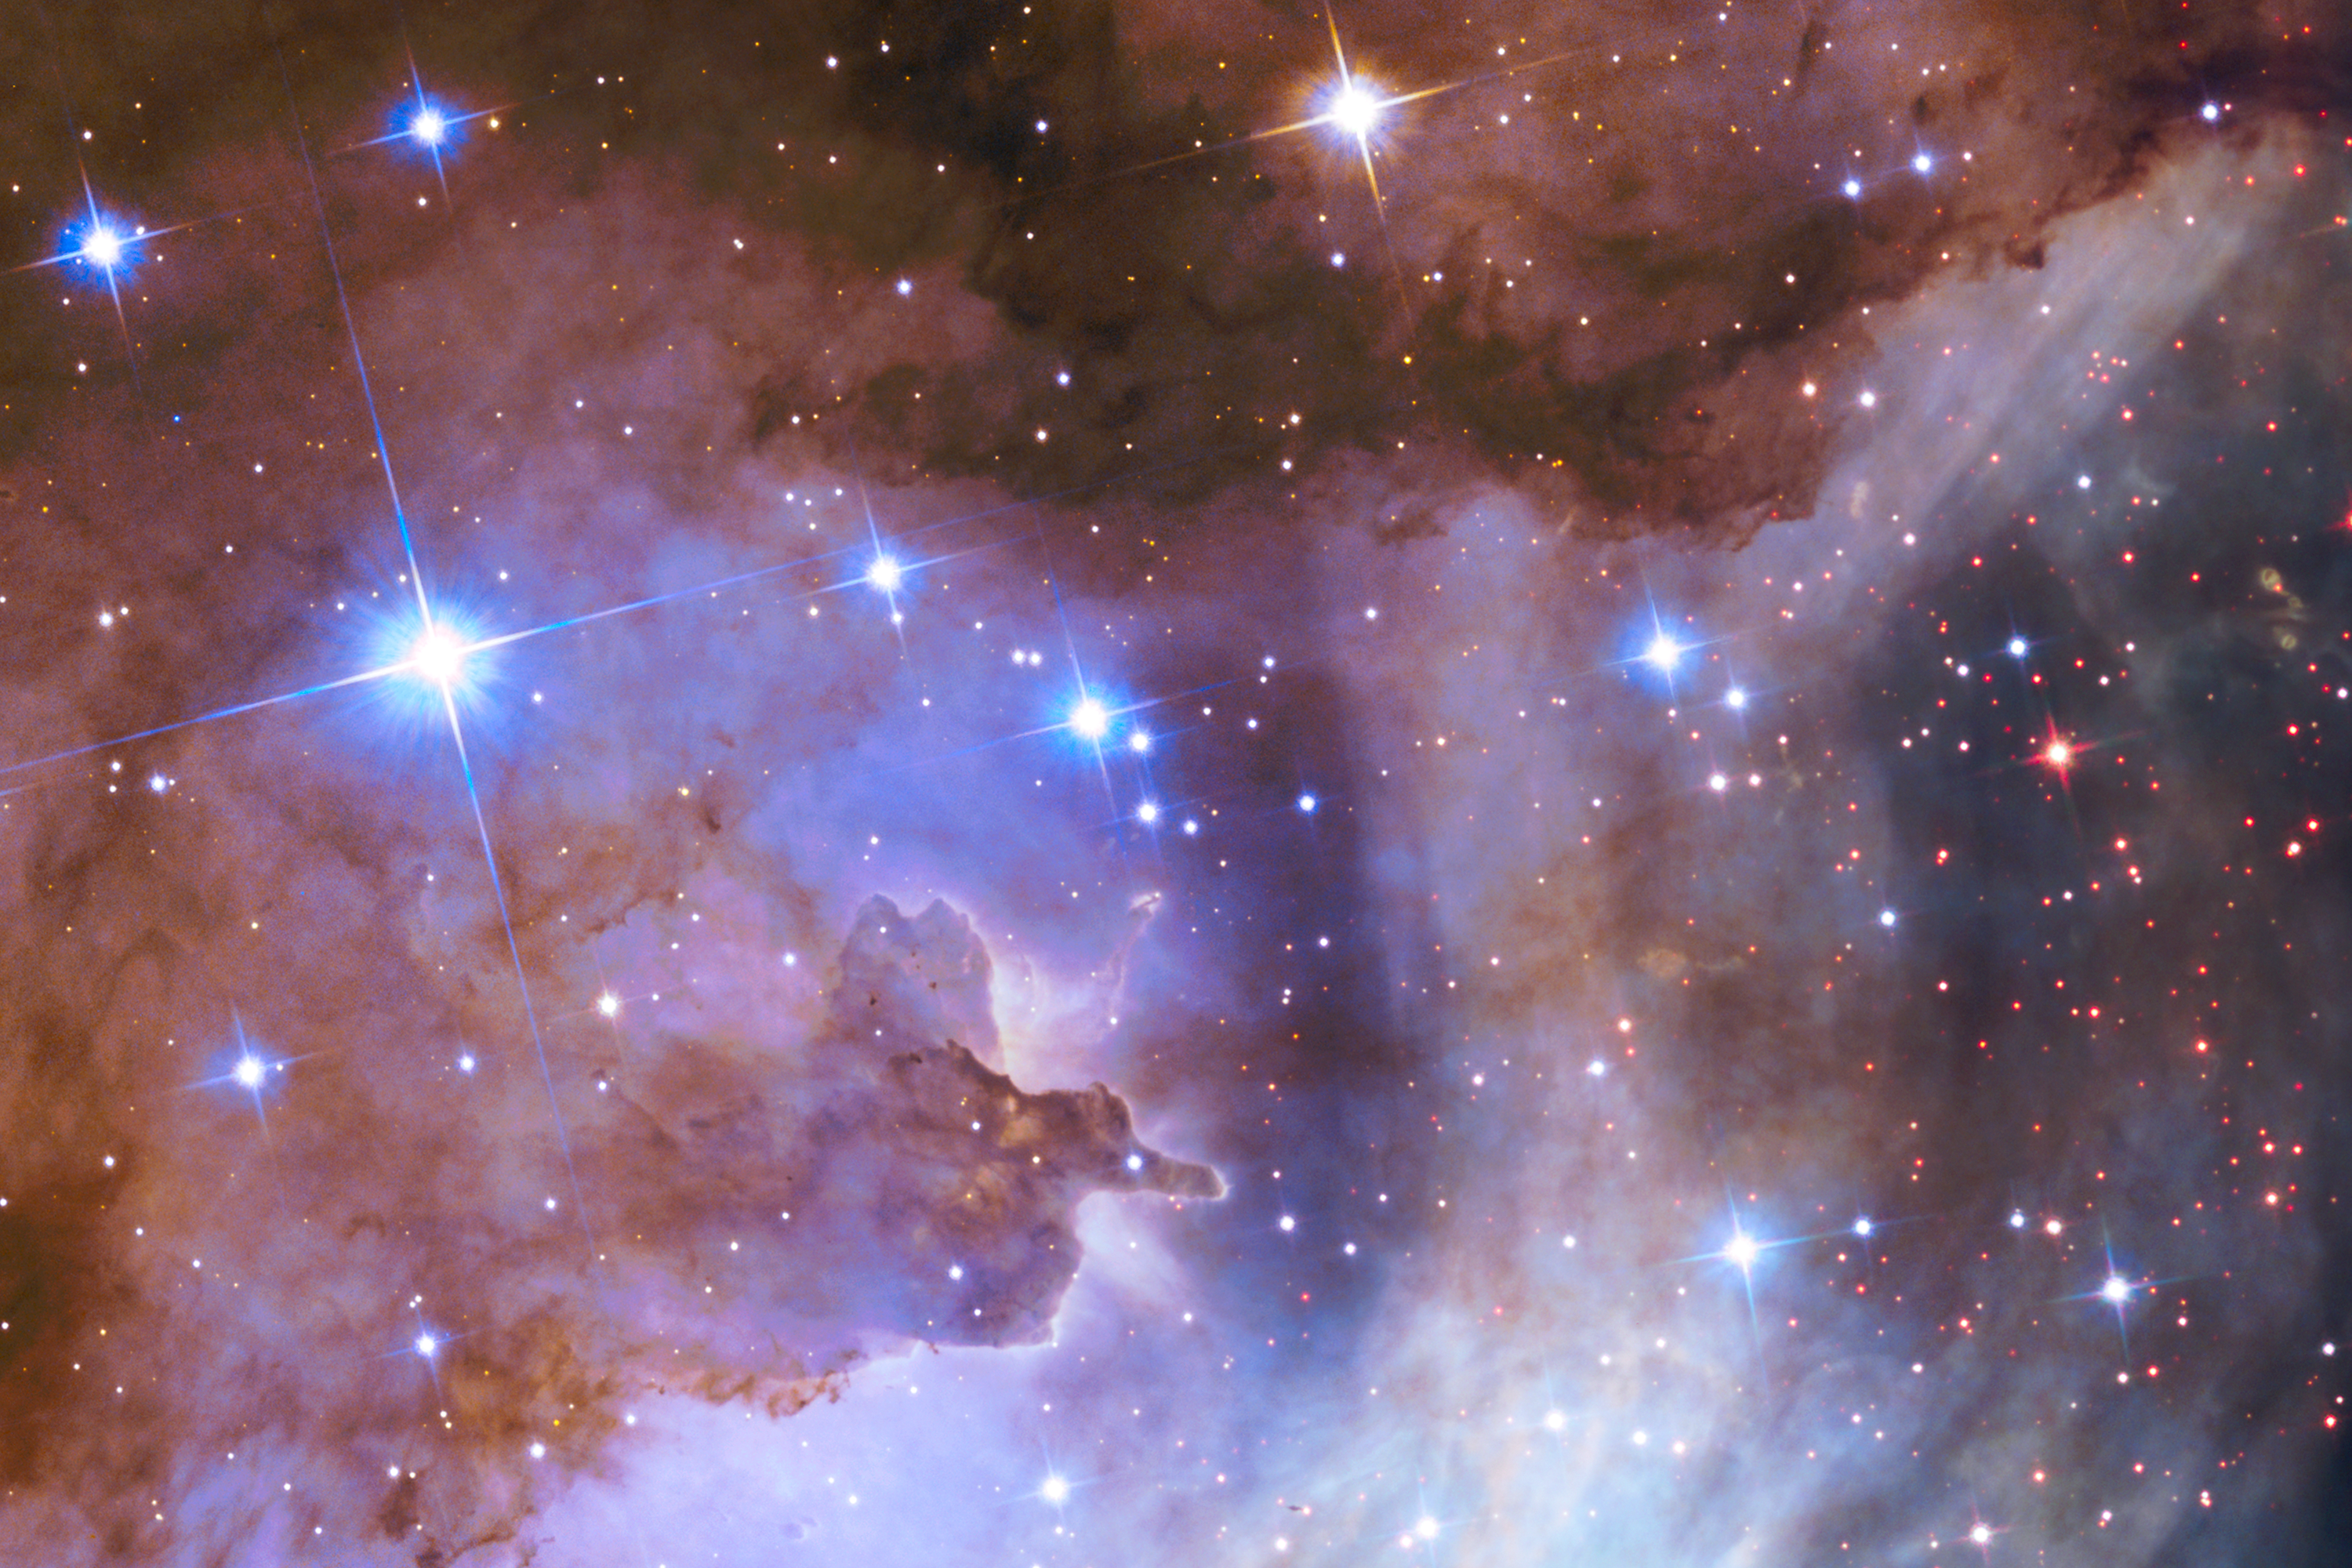

Star-forming region Gum 29

This image shows the star-forming region Gum 29 which surrounds star cluster Westerlund 2. This is a section of the new NASA/ESA Hubble Space Telescope image of Westerlund 2 and its surroundings, released to celebrate Hubble’s 25th anniversary.

Some of the heftiest stars in Westerlund 2 are carving deep cavities in material surrounding them by unleashing torrents of ultraviolet light and high speed streams of charged particles, known as stellar winds. These are etching away the enveloping hydrogen gas cloud in which the stars were born and are responsible for the weird and wonderful shapes of the clouds of gas and dust in this image.

The brightest stars in this image are Milky Way foreground stars not associated with Westerlund 2.

Credit: NASA, ESA, the Hubble Heritage Team (STScI/AURA), A. Nota (ESA/STScI), and the Westerlund 2 Science Team